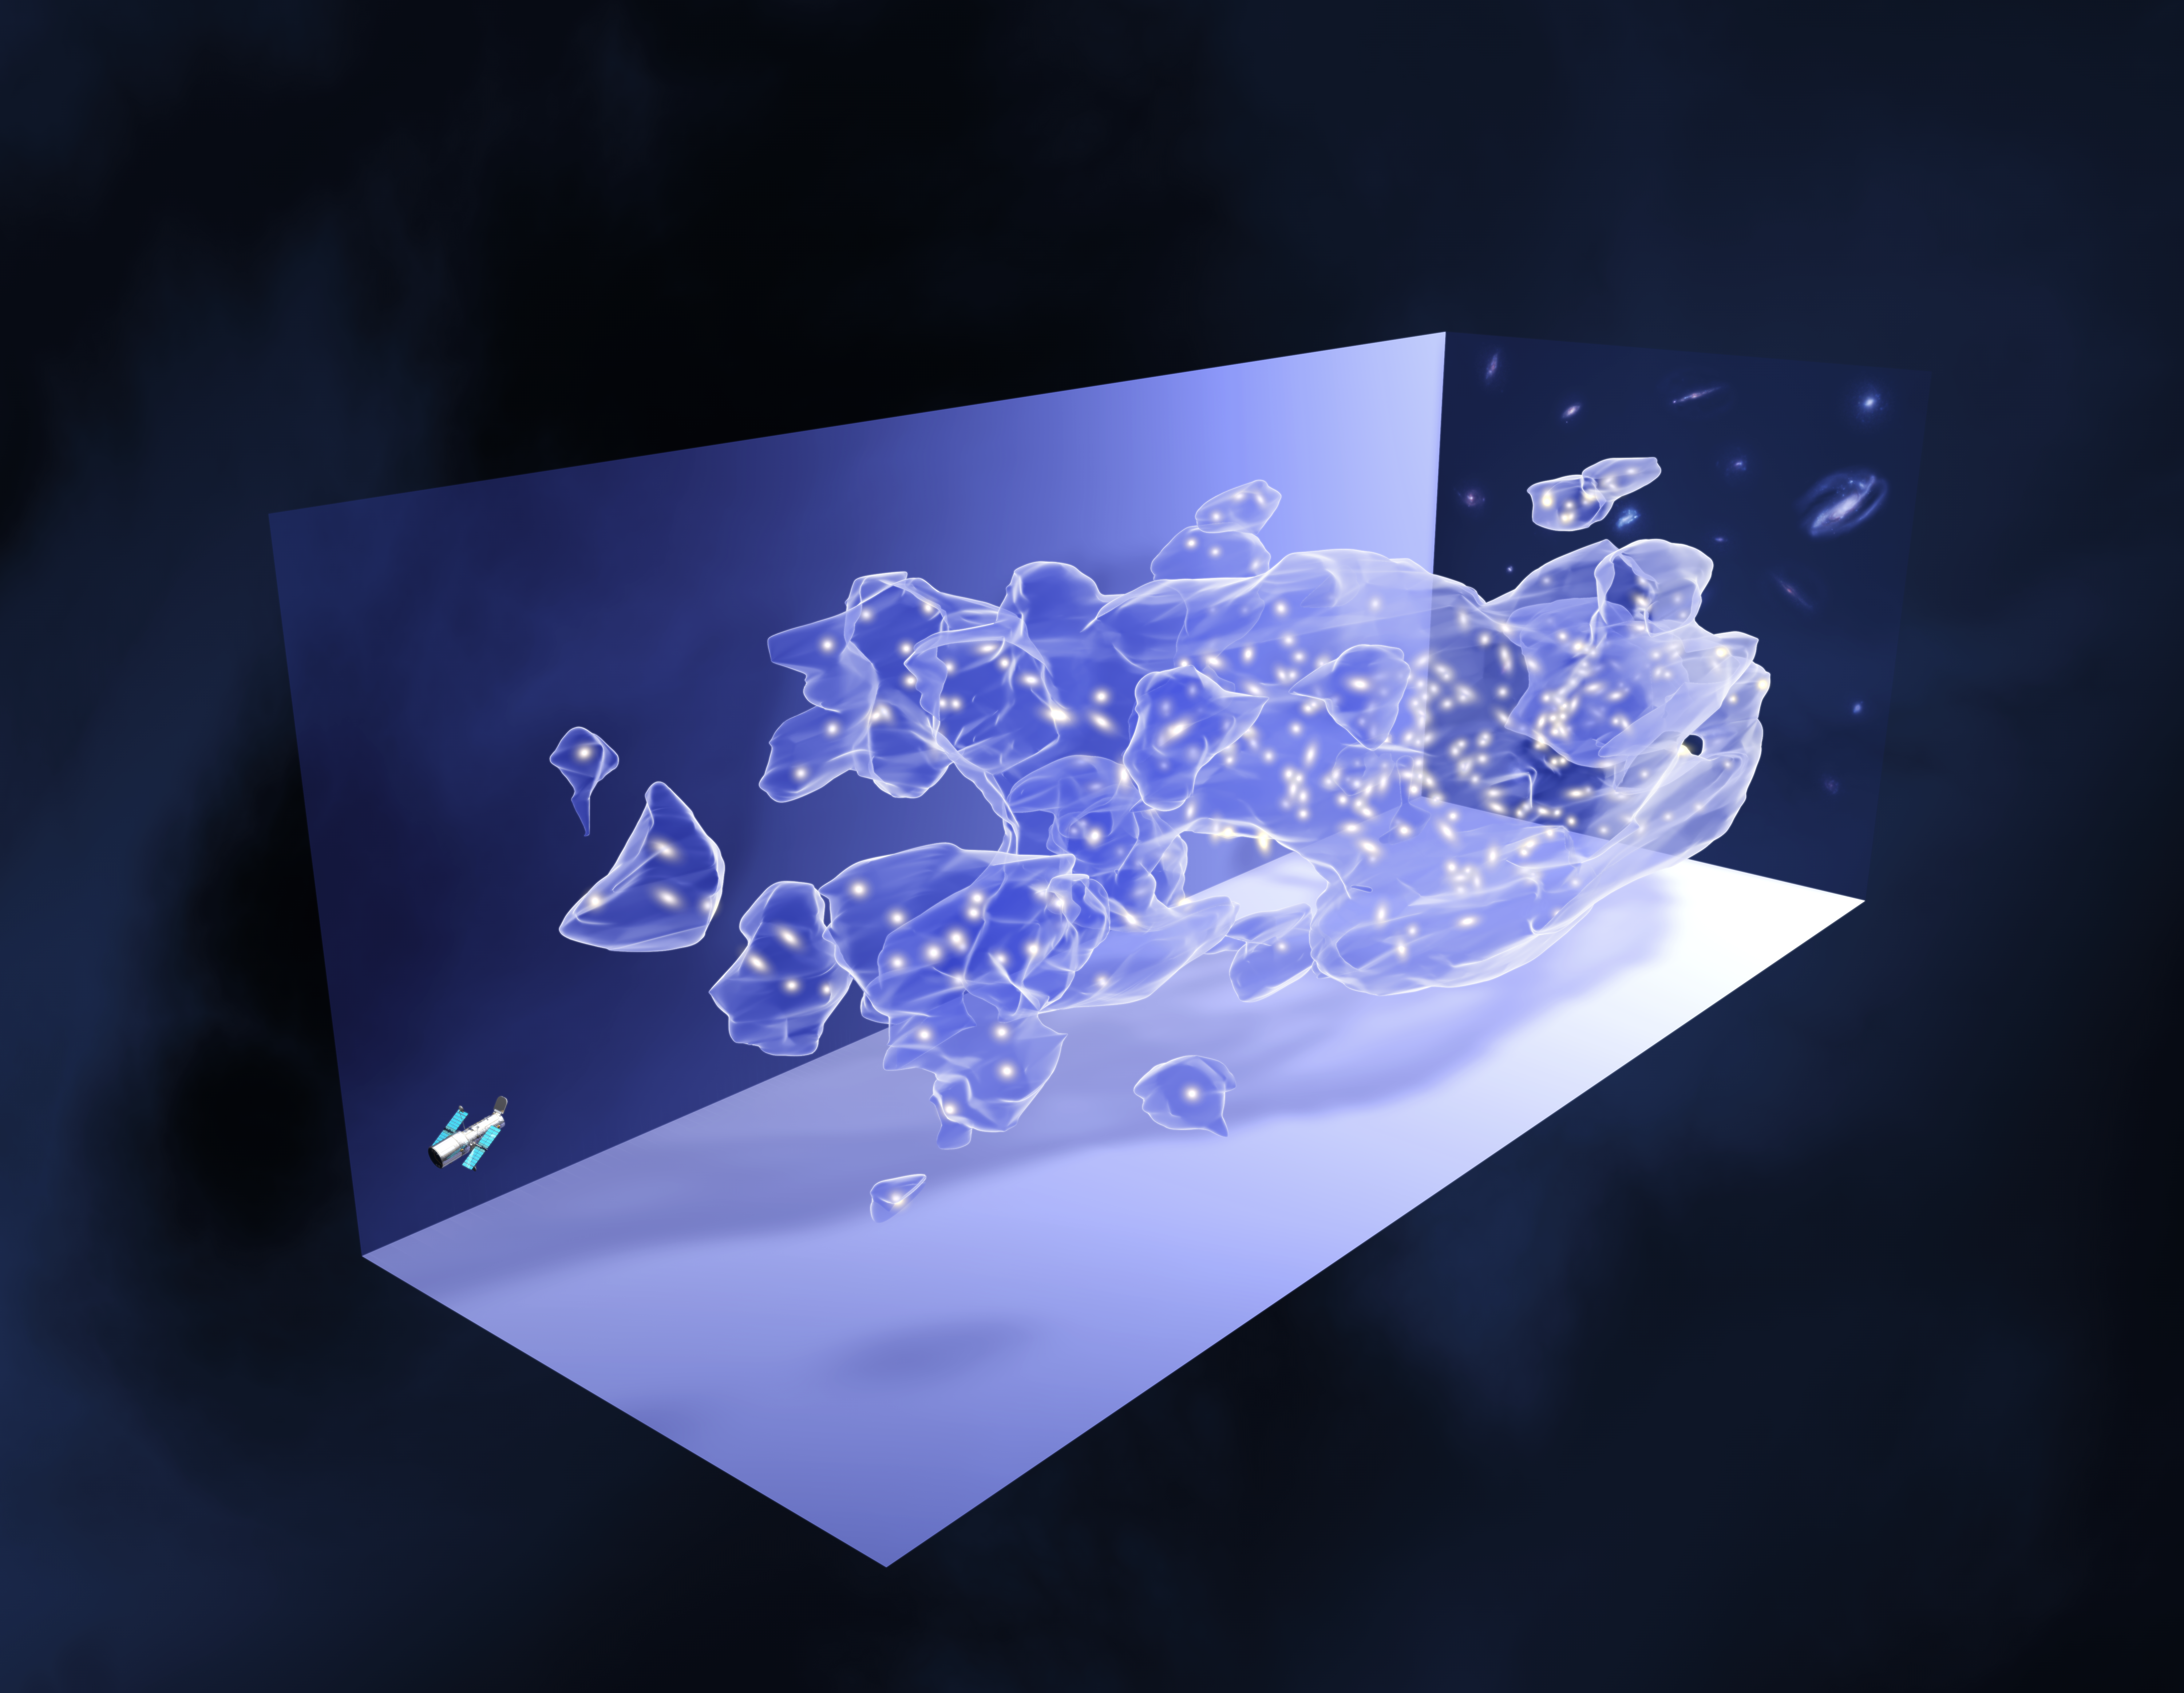

The COSMOS survey (artist's impression)

This is an artist's impression based on real data. The yellow spots represent galaxies, plotted in the graph for illustrative purposes.

This three-dimensional map offers a first look at the web-like large-scale distribution of dark matter, an invisible form of matter that accounts for most of the Universe's mass.

The map reveals a loose network of dark matter filaments, gradually collapsing under the relentless pull of gravity, and growing clumpier over time.

When the slices across the Universe and back into time are combined, they make a three-dimensional map of dark matter in the Universe. The three axes of the box correspond to sky position (in right ascension and declination), and distance from the Earth increasing from left to right (as measured by cosmological redshift). Note how the clumping of the dark matter becomes more pronounced, moving right to left across the volume map, from the early Universe to the more recent Universe.

Credit: NASA, ESA and R. Massey (California Institute of Technology)